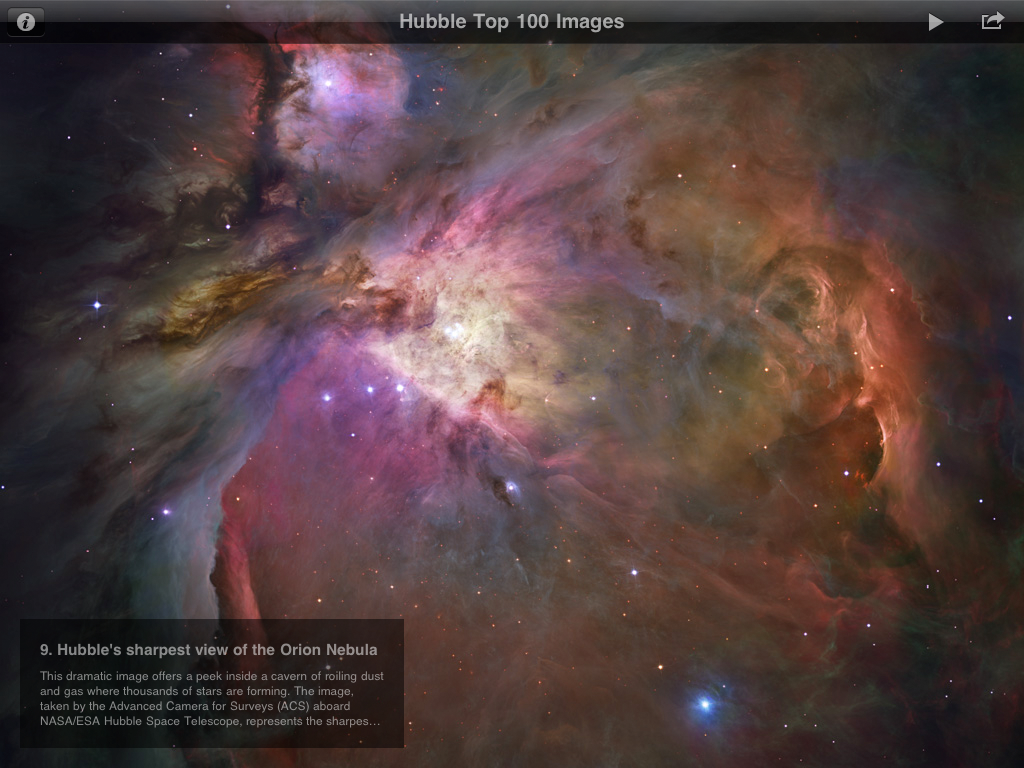

The ESA/Hubble top 100 images iPad app screenshot

The ESA/Hubble Top 100 Images app is a free iPad app that brings users a selection of the most dramatic photos of the Universe from ESA/Hubble, as NASA’s partner in this international project. Among the features of the app are captions and links for more information, a wallpaper option, slideshow play mode with background music. The image shows screenshots from the ESA/Hubble Top 100 Images app. You can download the app for free from here.

Credit: ESA/Victor R. Ruiz